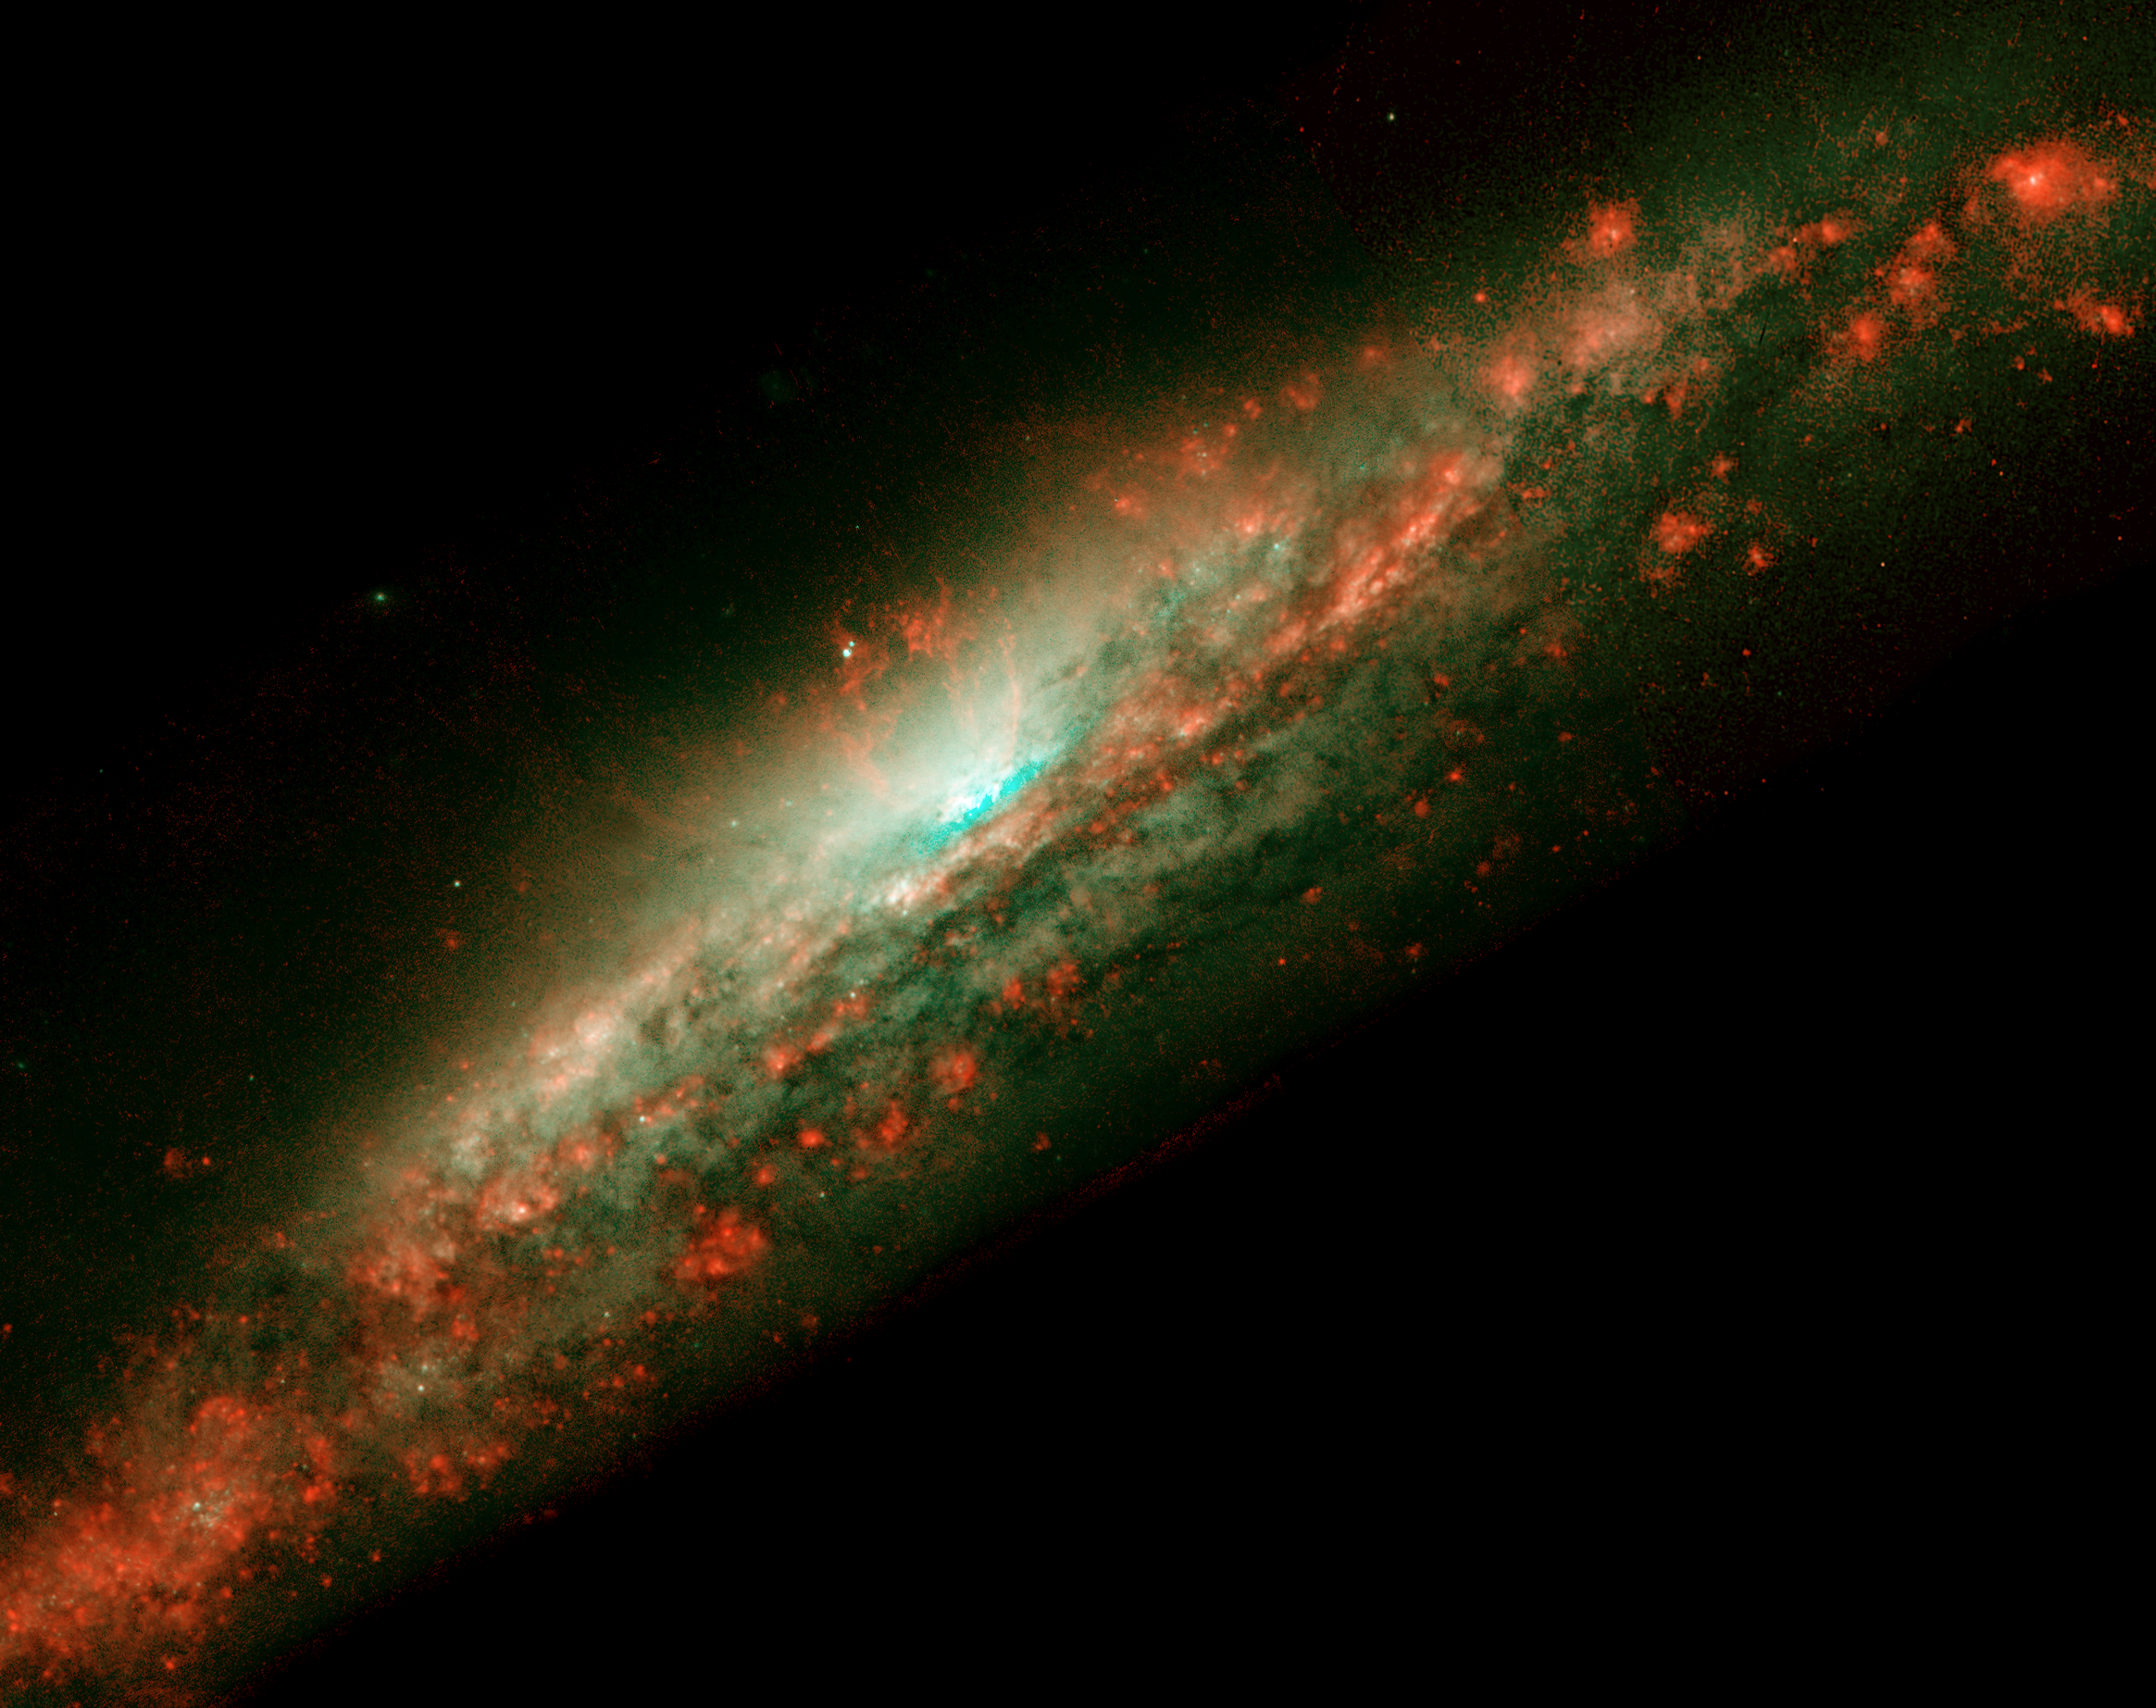

Baby Burp in Galaxy's Core (Galaxy View)

These NASA/ESA Hubble Space Telescope snapshots reveal dramatic activities within the core of the galaxy NGC 3079, where a lumpy bubble of hot gas is rising from a cauldron of glowing matter. The picture at left shows the bubble in the center of the galaxy's disk. The structure is more than 3, 000 light-years wide and rises 3, 500 light-years above the galaxy's disk. The smaller photo at right is a close-up view of the bubble. Astronomers suspect that the bubble is being blown by 'winds' (high-speed streams of particles) released during a burst of star formation. Gaseous filaments at the top of the bubble are whirling around in a vortex and are being expelled into space. Eventually, this gas will rain down upon the galaxy's disk where it may collide with gas clouds, compress them, and form a new generation of stars. The two white dots just above the bubble are probably stars in the galaxy.

Credit: NASA/ESA, Gerald Cecil (University of North Carolina), Sylvain Veilleux (University of Maryland), Joss Bland-Hawthorn (Anglo-Australian Observatory), and Alex Filippenko (University of California at Berkeley)